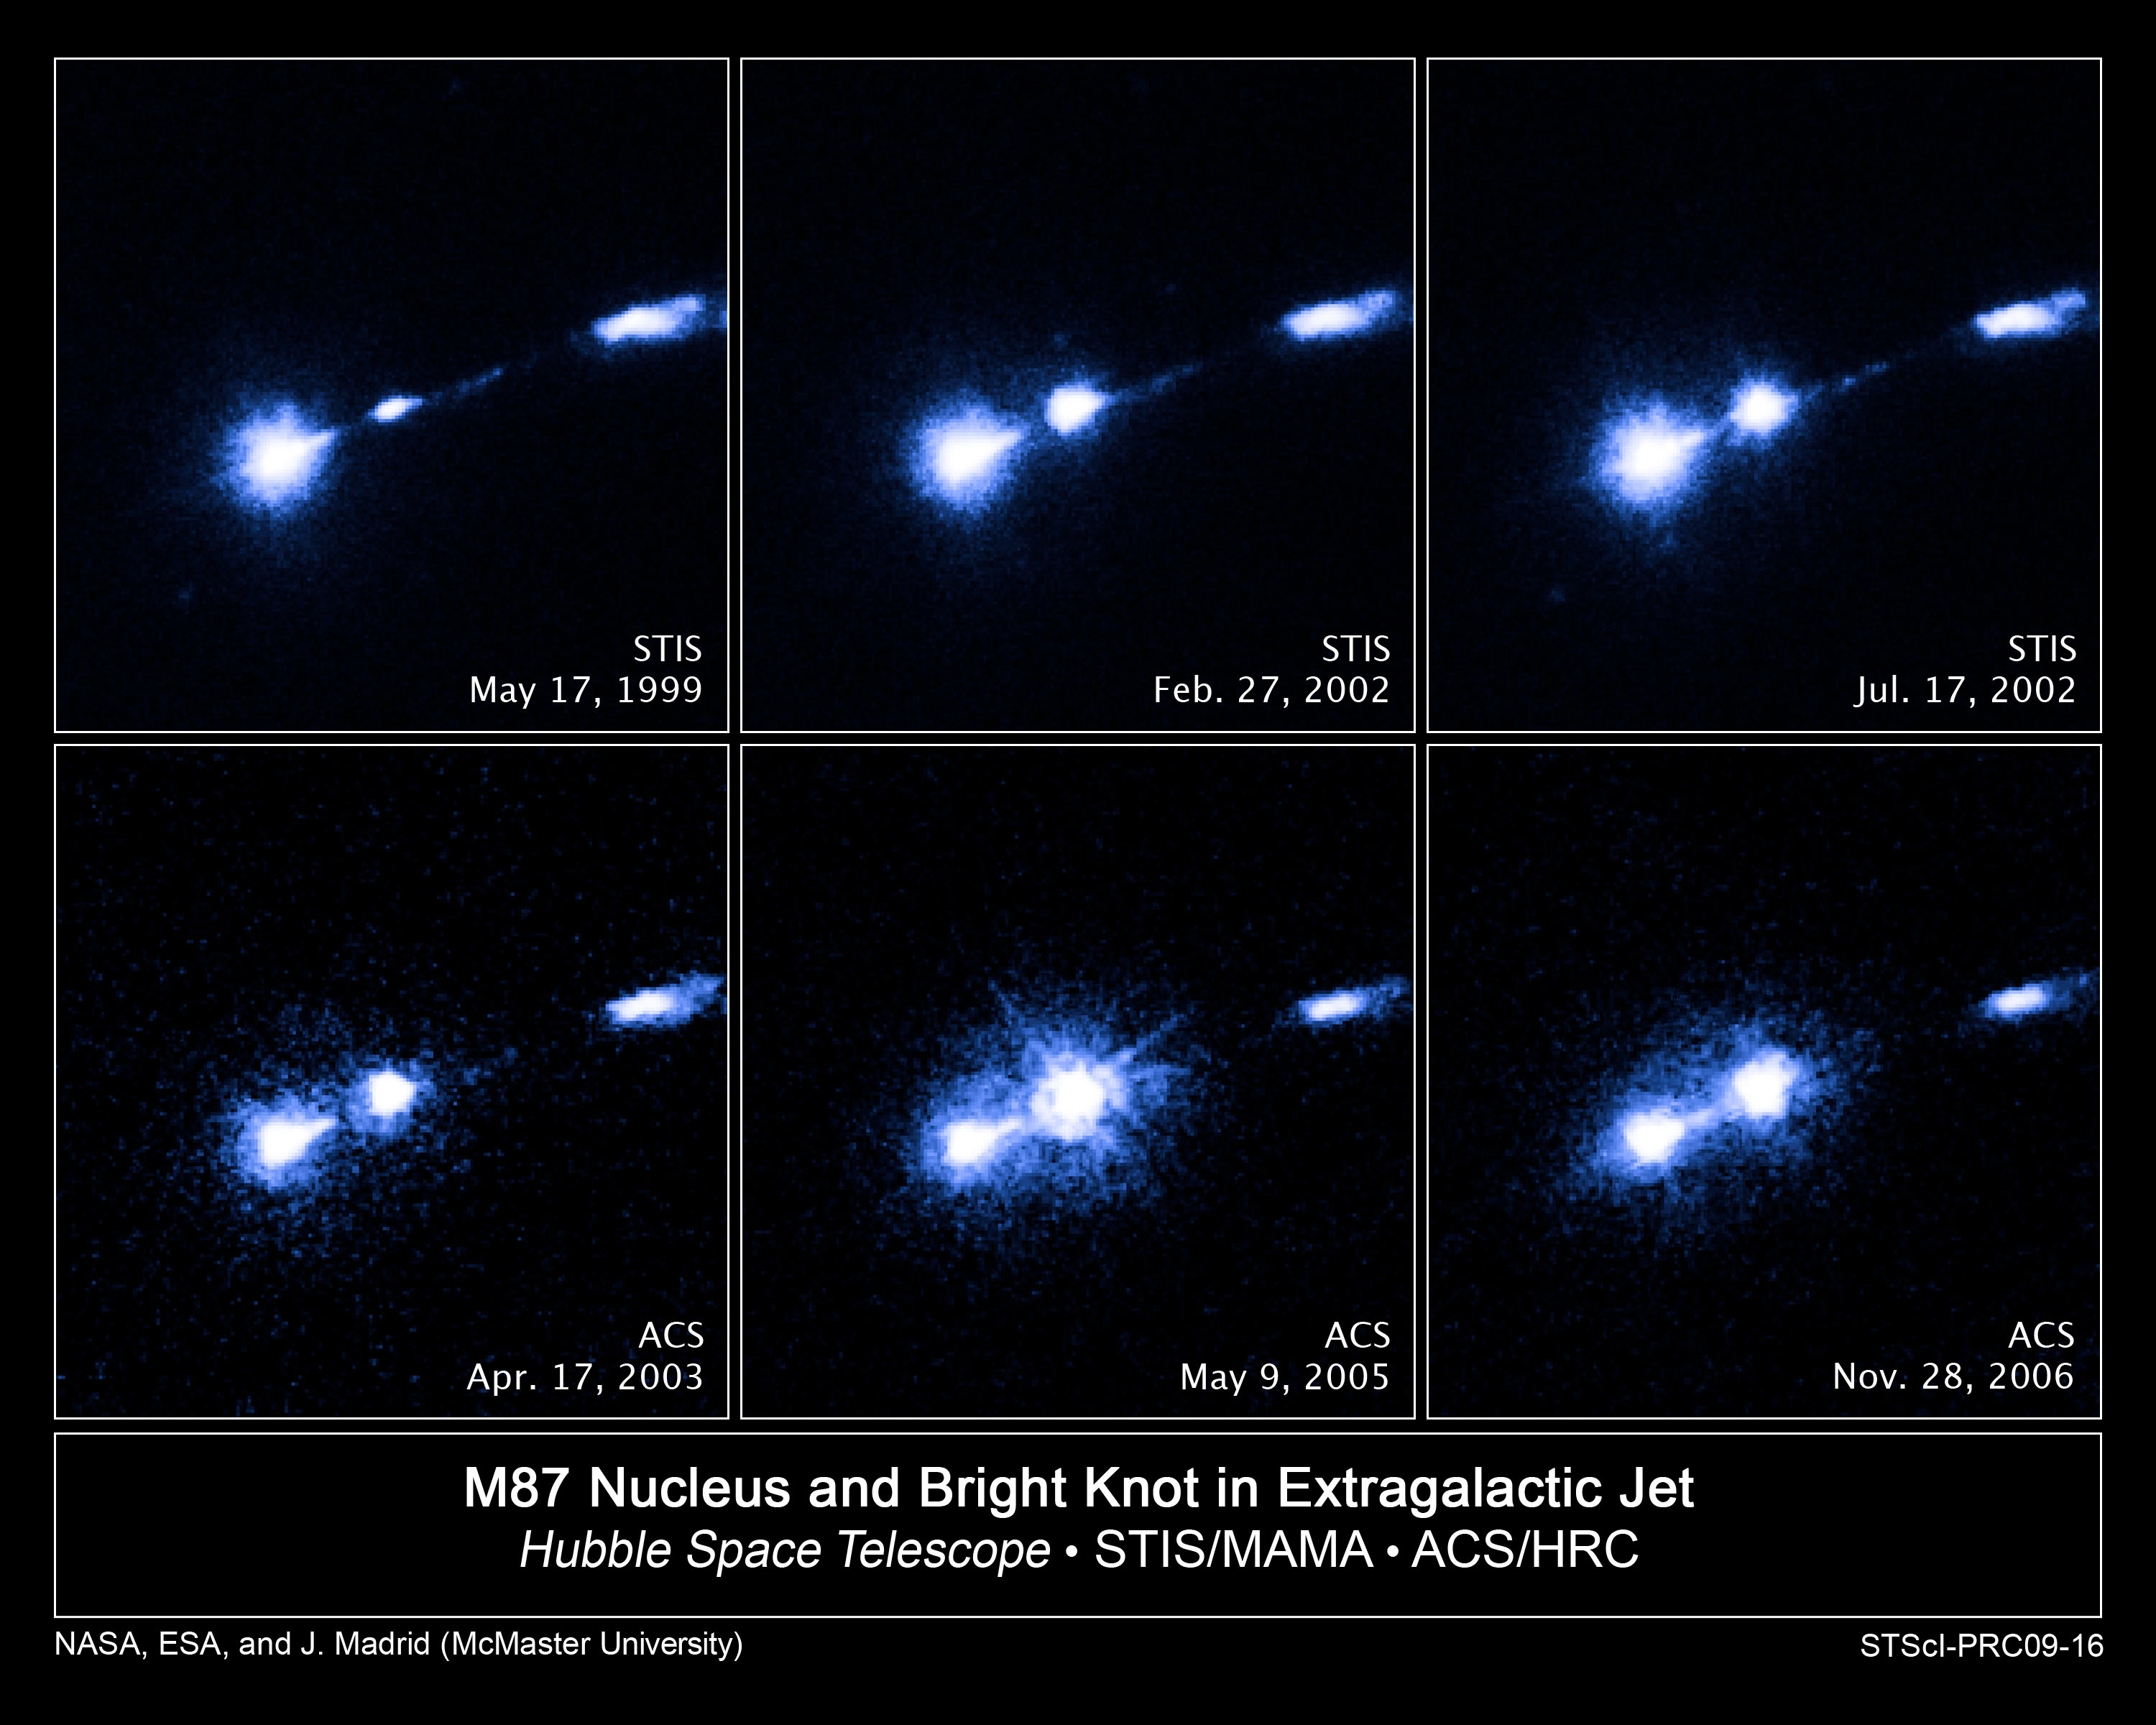

Flare-up in extragalactic jet

These images taken in ultraviolet light by the NASA/ESA Hubble Space Telescope reveal the brightening of a jet of gas blasting from the core of the gigantic elliptical galaxy M87. M87 is located 54 million light-years away in the Virgo Cluster.

The flare-up is coming from a knot of hot gas, called HST-1, embedded in the jet. The jet is powered by accretion onto a supermassive black hole, one of the most massive black holes yet discovered.

Hubble's Space Telescope Imaging Spectrograph (STIS) snapped the top row of images and Hubble's Advanced Camera for Surveys (ACS) the bottom row. The core of M87 is located at lower left in the images. HST-1 is the bright blob at centre. The glowing material at far right is part of a stream of particles in the jet that speed up and glow in the ultraviolet.

The Hubble images, obtained from the Hubble archive, show the jet growing brighter over a seven-year period, eventually outshining even the luminous core of M87. The ACS image taken on 9 May 2005, reveals that HST-1 has become brighter than M87's core. HST-1 is 214 light-years from the core.

Hubble's crisp vision gives astronomers a clear view of the brightening knot. The telescope resolves HST-1 and separates it from the galaxy's core.

Credit: NASA, ESA and J. Madrid (McMaster University, Canada)